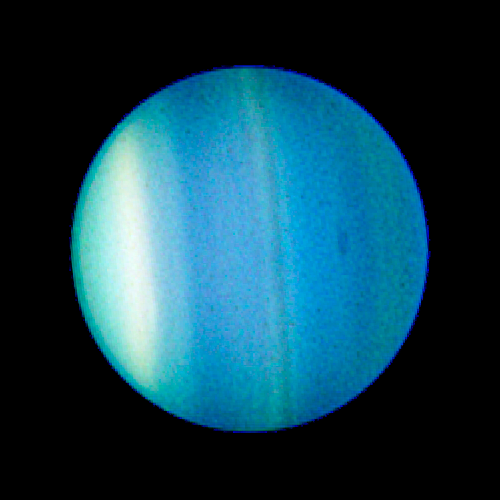

Uranus and Dark Spot - August 23, 2006

This image shows Uranus with a dark spot clearly visible on the eastern side. This dark spot is a vortex measuring 1,100 miles by 1,900 miles — large enough to engulf two-thirds of the United States — and was caused by churning winds in the planet's atmosphere.

For a closer view of the spot see here.

Credit: NASA, ESA, L. Sromovsky and P. Fry (University of Wisconsin), H. Hammel (Space Science Institute), and K. Rages (SETI Institute)